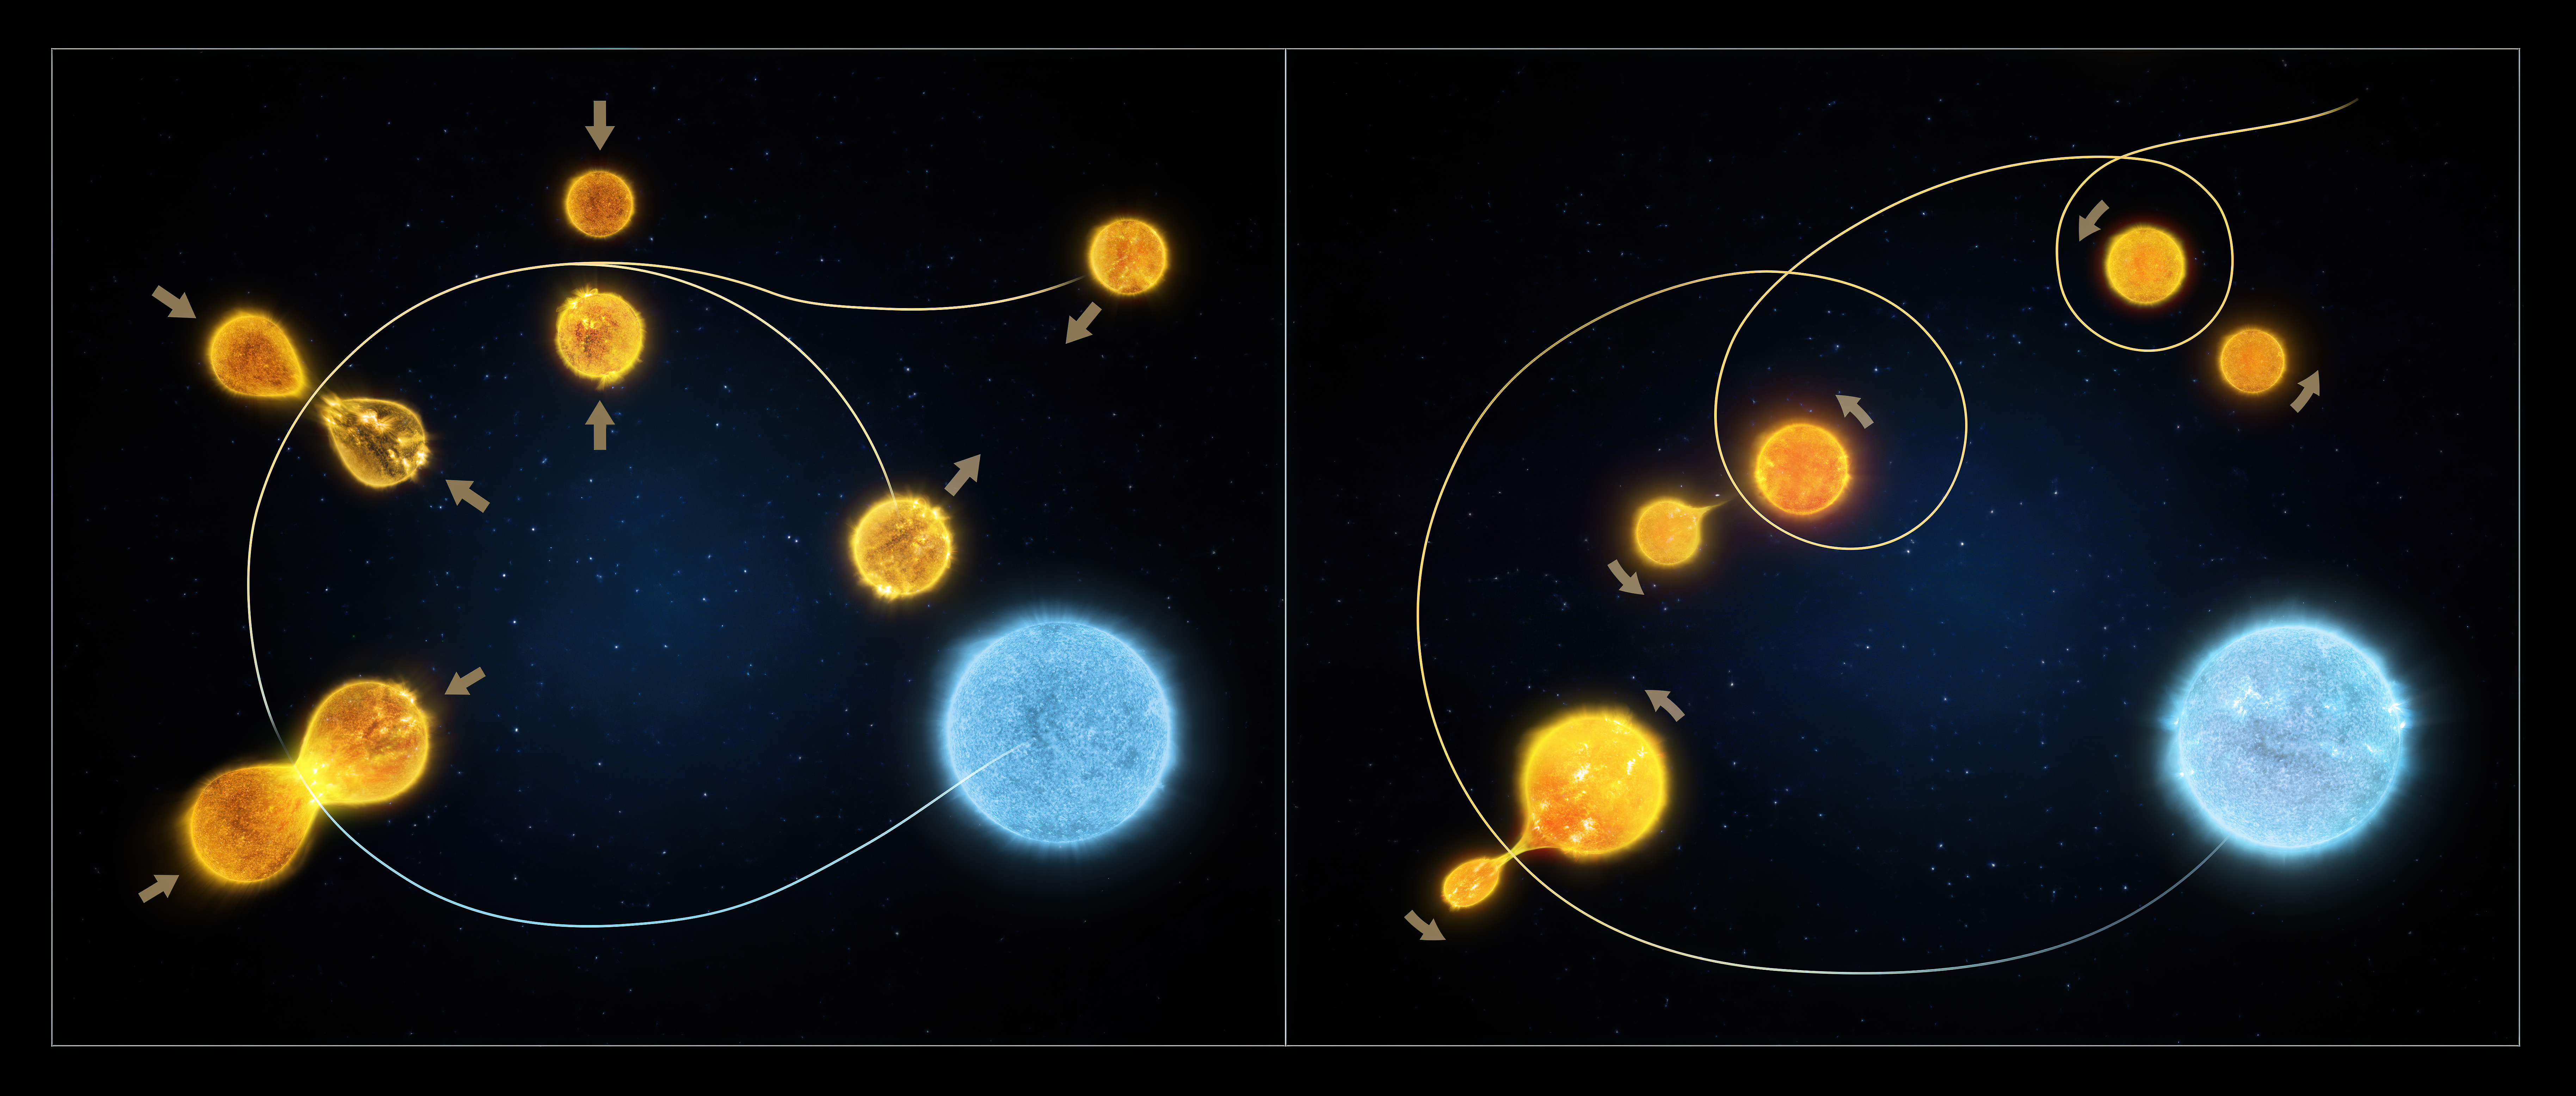

The formation of blue stragglers

This illustration demonstrates the two ways that blue stragglers in star clusters form.

The illustration on the left shows the collision model where two low-mass stars in an overcrowded environment experience a head-on collision, combining their fuel and mass to form a single hot star.

The illustration on the right depicts the "vampire" model consisting of a pair of stars that undergo a transformation, with the lower-mass star draining its larger-mass companion of the hydrogen that fuels its rebirth.

Credit: ESA/Hubble, M. Kornmesser